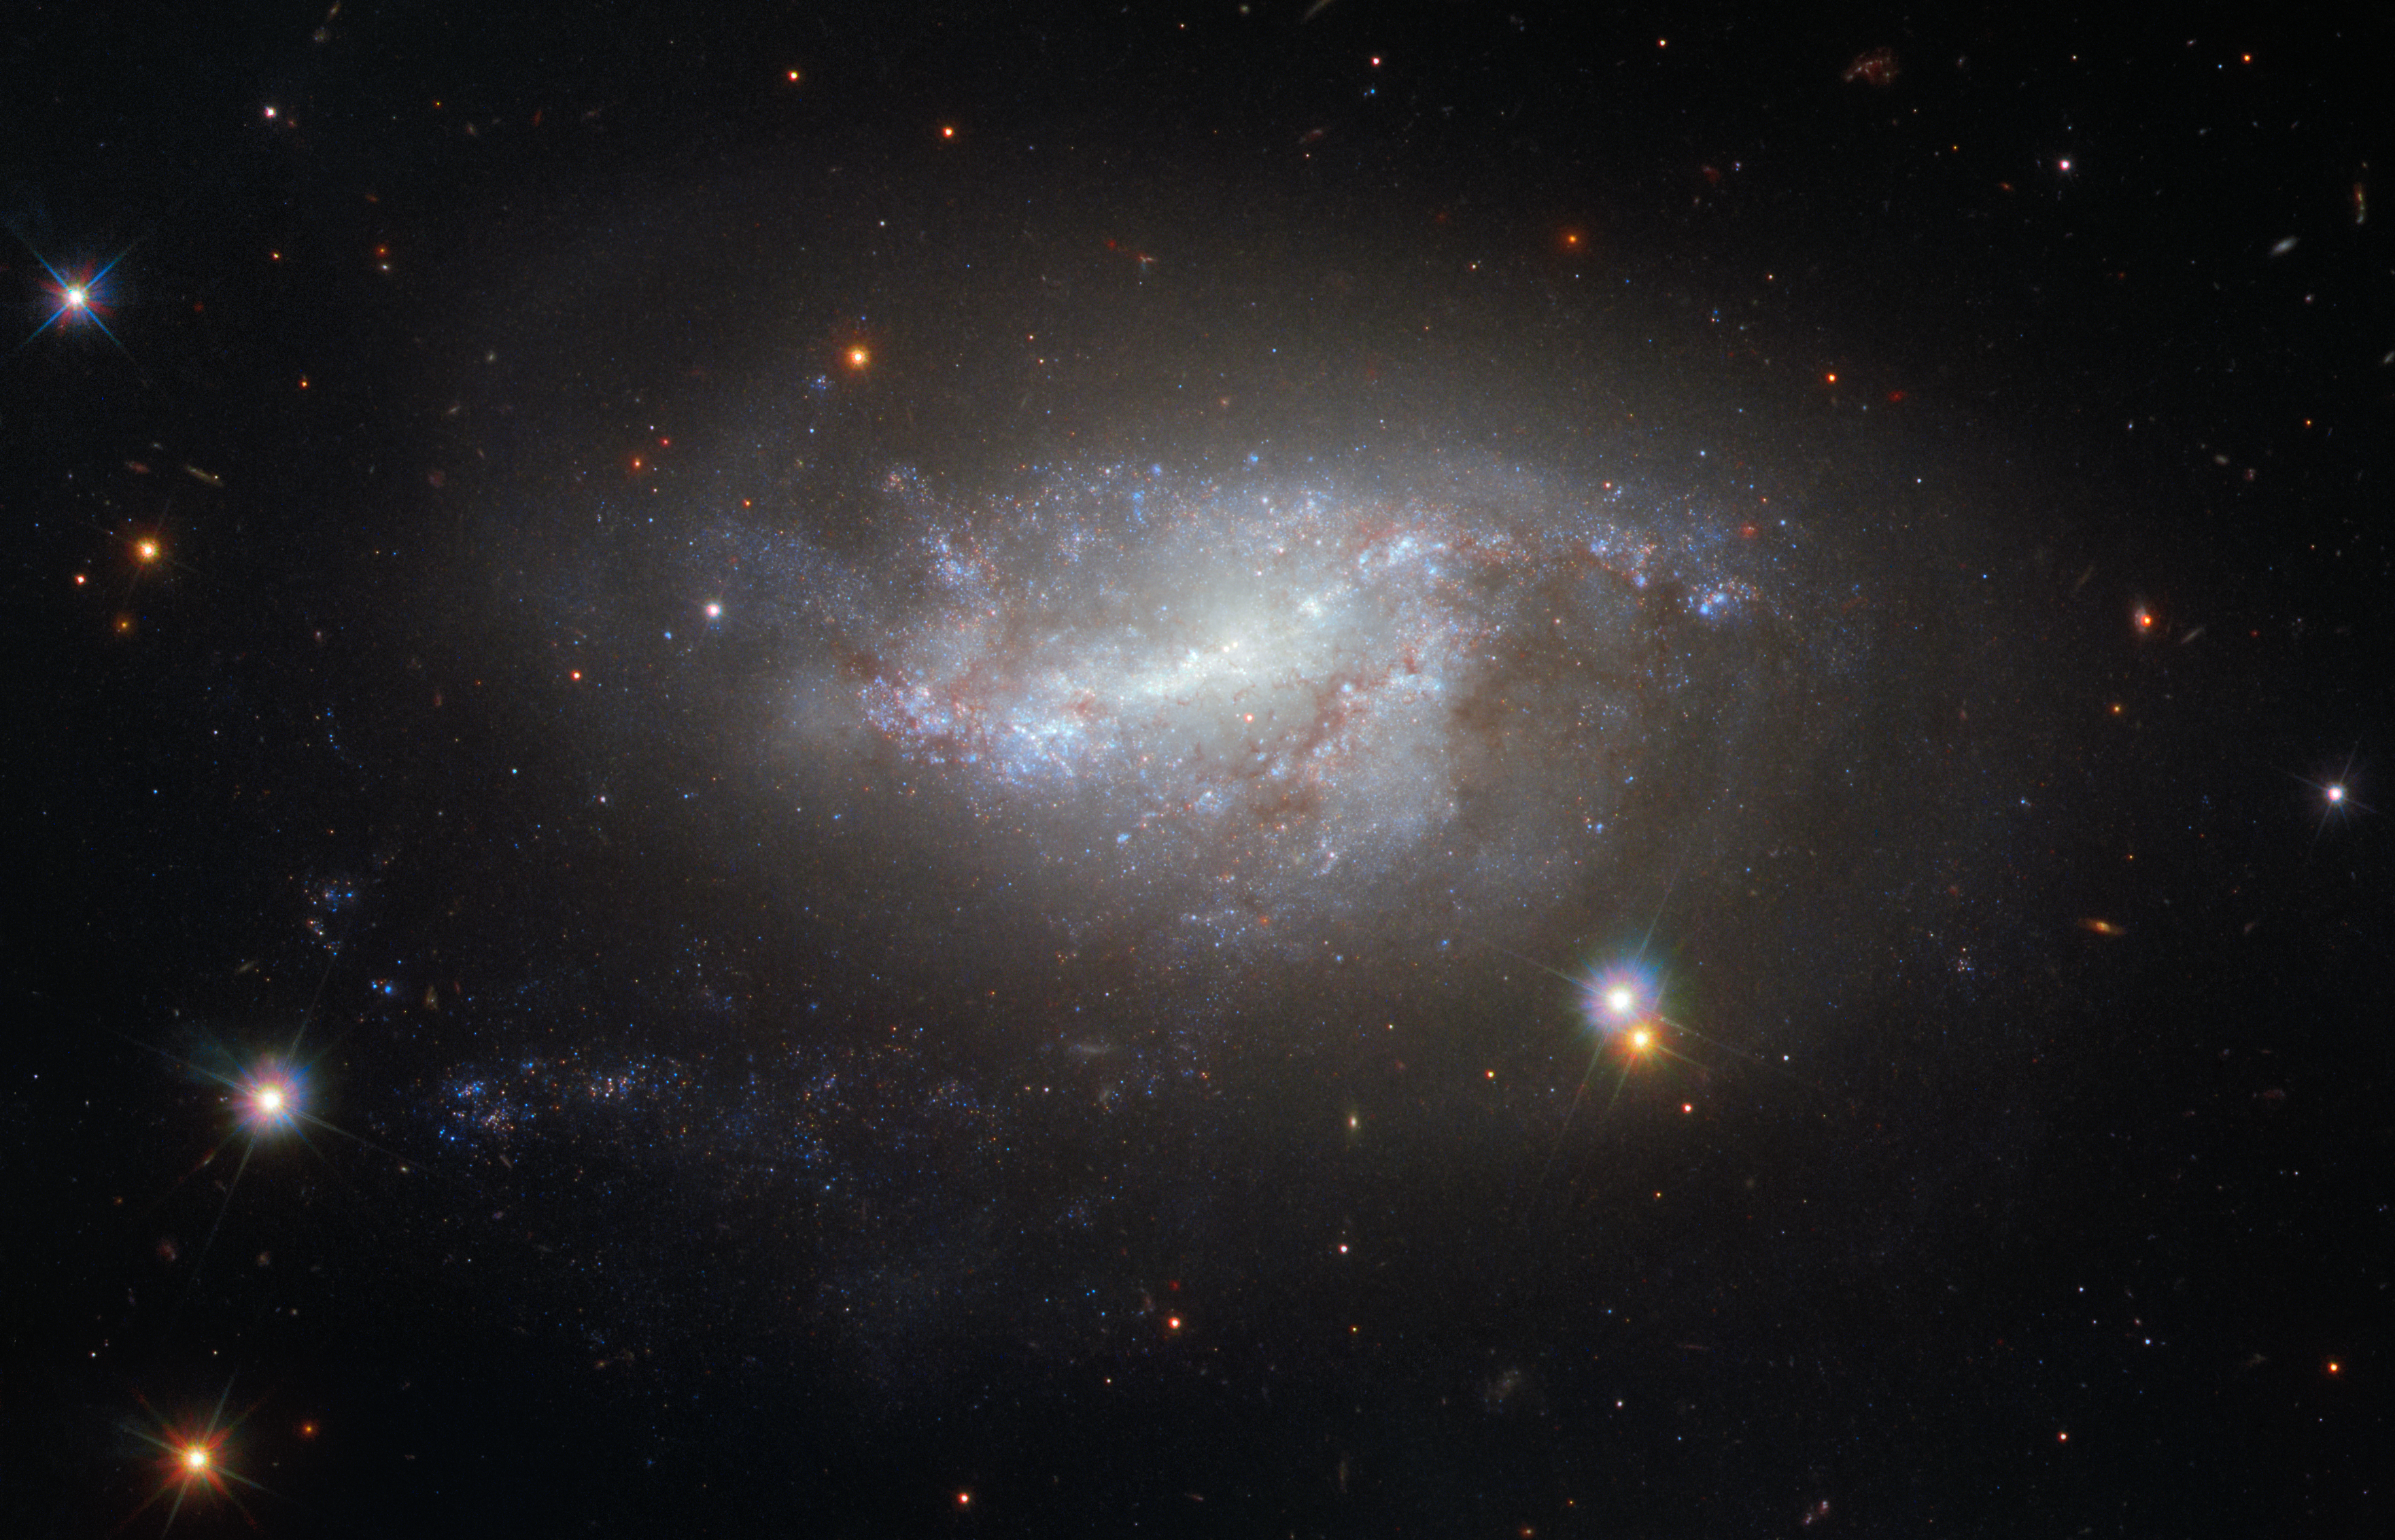

A cosmic conversation

This image from Hubble’s Wide Field Camera 3 (WFC3) shows a spiral galaxy NGC 5917, perhaps best known for its intriguing interactions with its neighbouring galaxy MCG-01-39-003 (not visible here, but located off the bottom right of the frame — as seen here).

Mass is often confused with weight, but they are very different things. Mass is the very substance of an object and is something one always has, no matter the location. If you fly to the Moon and experience low-gravity conditions, your mass has not changed at all. What has actually changed is your weight, because weight is a force caused by the gravitational attraction of another massive body. Gravity is how objects with mass “talk” to one another. People do weigh less on the Moon, but not because they have lost any body mass — the mass of the Moon is less than that of the Earth, so it exerts a smaller gravitational pull on them.

Understanding mass is vital when it comes to understanding why objects behave the way they do in space. Without mass “talking” via gravity, the planets would not orbit the Sun, and galaxies would not interact as NGC 5917 does with its neighbour. Galaxy interactions can lead to very interesting effects; the galaxies can steal mass — in form of stars, dust and gas — from one another, distort and warp one another’s shape, or trigger immense waves of new star formation. Sometimes, a galactic duo interact so strongly that they end up colliding and merging completely. Unfortunately, if NGC 5917 is destined to merge with its celestial neighbour, it will happen much too far into the future for us to enjoy the spectacle.

Credit: ESA/Hubble & NASA